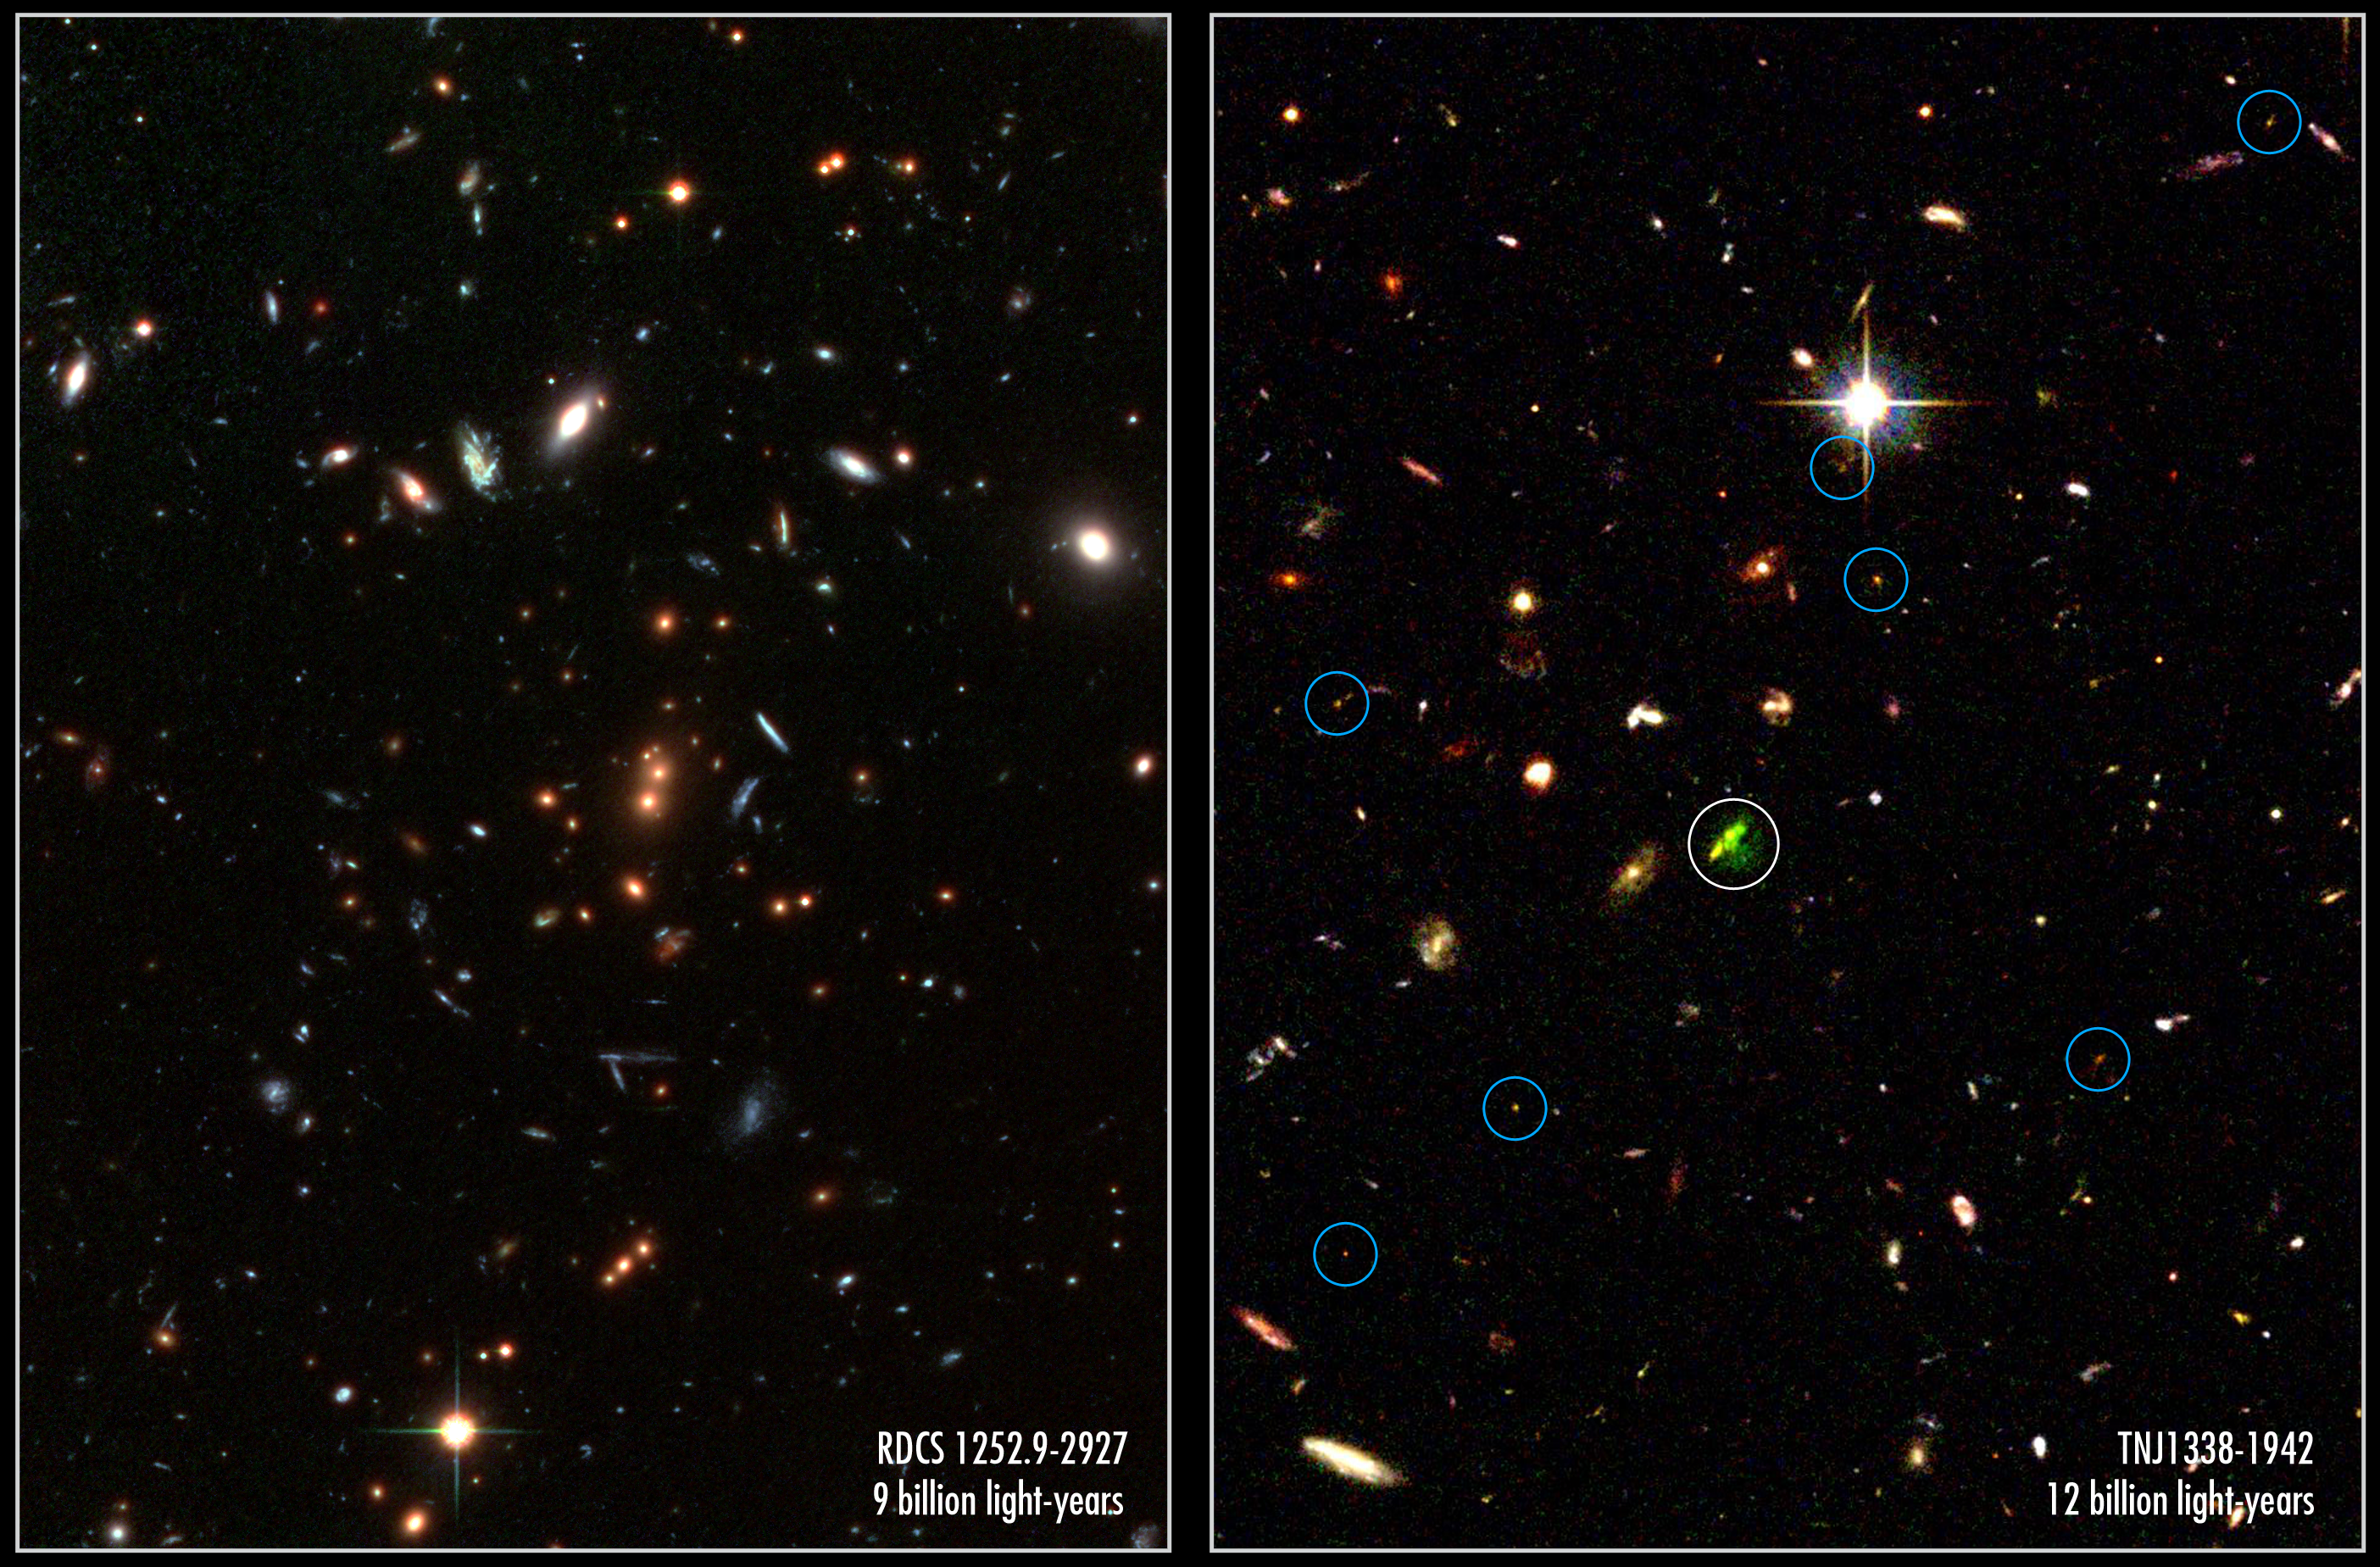

A tale of two record-breaking clusters

Looking back in time to when the universe was in its formative youth, the Advanced Camera for Surveys (ACS) aboard the NASA/ESA Hubble Space Telescope captured these revealing images of two galaxy clusters.

The image at left, which is made with an additional infrared exposure taken with the European Southern Observatory's Very Large Telescope, shows mature galaxies in a massive cluster that existed when the cosmos was 5 billion years old. The cluster, called RDCS1252.9-2927, is as massive as 200 trillion suns and is the most massive known cluster for its epoch. The image reveals the core of the cluster and is part of a much larger mosaic of the entire cluster. Dominating the core are a pair of large, reddish elliptical galaxies [near centre of image]. Their red colour indicates an older population of stars. Most of the stars are at least 1 billion years old. The two galaxies appear to be interacting and may eventually merge to form a larger galaxy that is comparable to the brightest galaxies seen in present-day clusters.

The red galaxies surrounding the central pair are also cluster members. The cluster probably contains many thousands of galaxies, but only about 50 can be seen in this image. The full mosaic (heic0313d) reveals several hundred cluster members. Many of the other galaxies in the image, including several of the blue galaxies, are foreground or background galaxies. The colour-composite image was assembled from two observations (through i and z filters) taken between May and June 2002 by the ACS Wide Field Camera, and one image with the ISAAC instrument on the VLT taken in 2002 (combined from a J filter exposure and a K filter exposure).

In the image at right, astronomers are seeing an embryonic cluster as it was when the universe was 1.5 billion years old. The young system, called TNJ1338-1942, is the most distant known developing cluster, or proto-cluster. It is dominated by a massive "baby galaxy" - the green object in the centre with the blue circle around it. The galaxy is producing powerful radio emissions, and is the brightest galaxy in the proto-cluster. The green colour indicates that the galaxy is emitting glowing hydrogen gas. Its clumpy appearance suggests that it is still in the process of forming. Smaller developing galaxies, marked by the blue circles, are scattered around the massive galaxy. The galaxy on the left of the massive galaxy is a foreground galaxy. The bright object in the upper half of the image is a foreground star.

This colour-composite image was assembled from observations taken between July 8 and 12, 2002 by the ACS Wide Field Camera.

Credits for RDCS1252: NASA, ESA, J. Blakeslee (Johns Hopkins University), M. Postman ( Space Telescope Science Institute) and P. Rosati, Chris Lidman & Ricardo Demarco (European Southern Observatory)
Credits for TNJ1338: NASA, ESA, G. Miley (Leiden Observatory) and R. Overzier (Leiden Observatory)